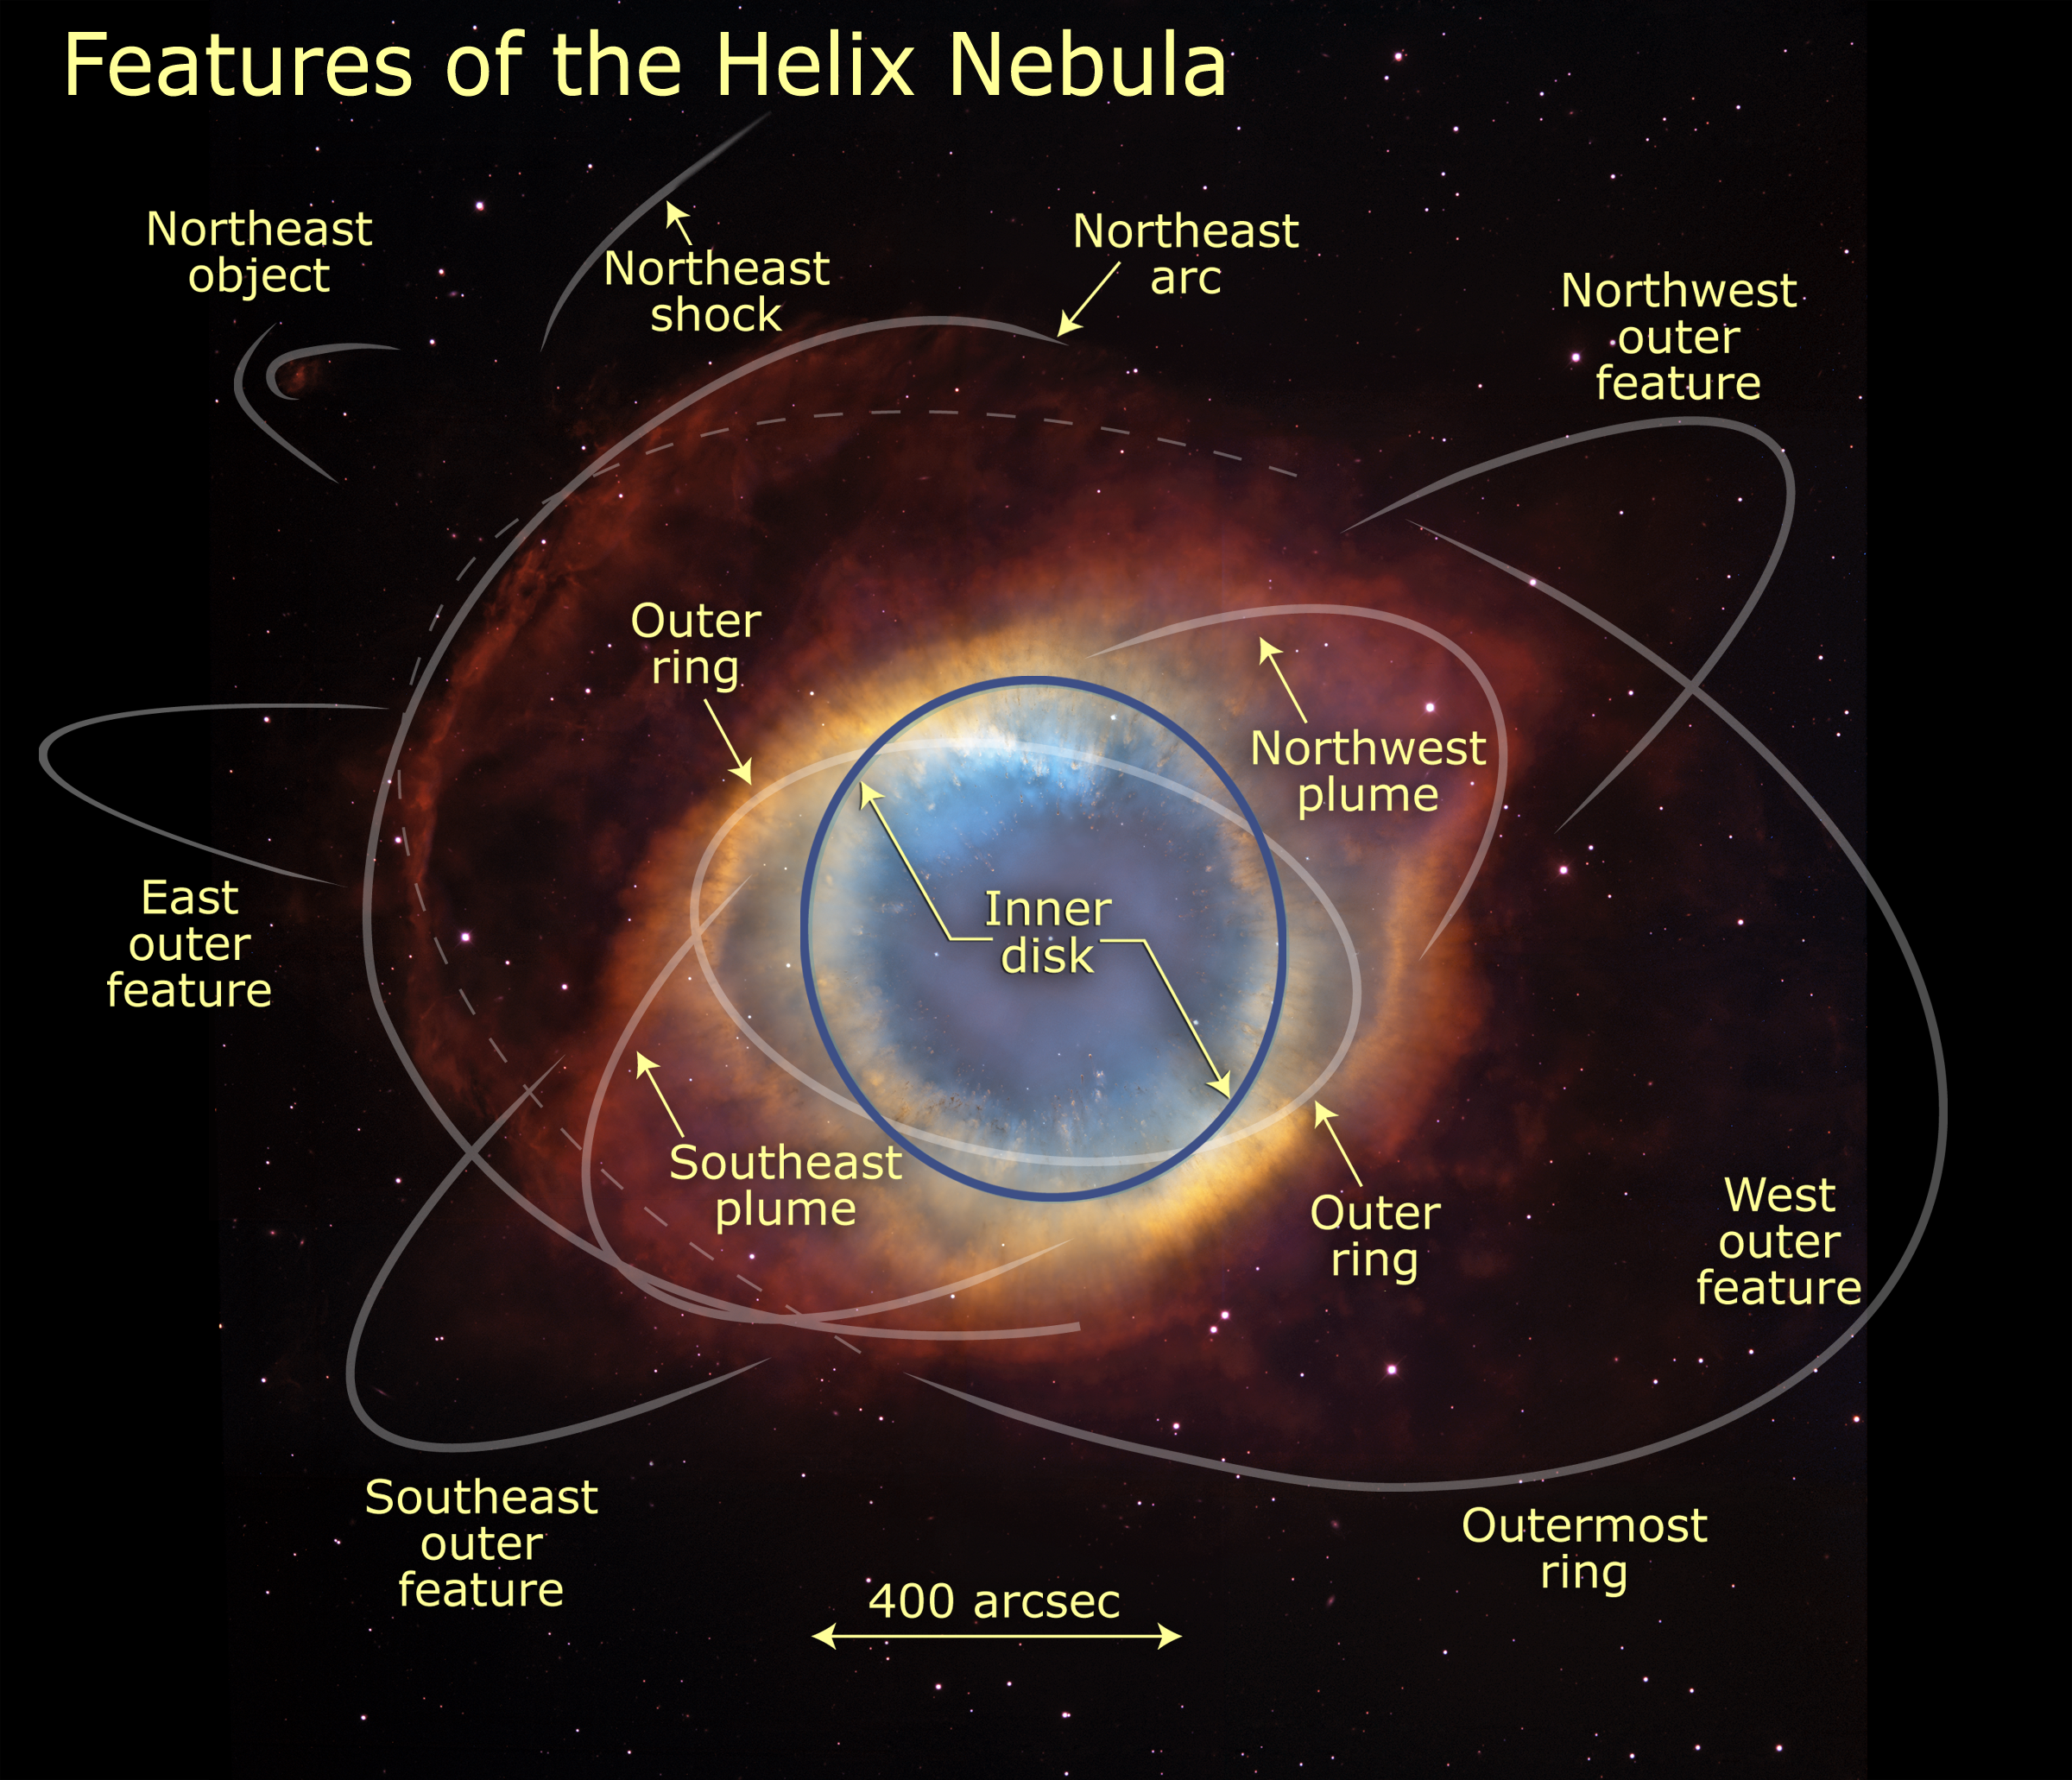

Helix Nebula with annotated features

Looks can be deceiving, especially when it comes to celestial objects like galaxies and nebulas. These objects are so far away that astronomers cannot see their three-dimensional structure. The Helix Nebula, for example, resembles a doughnut in colorful images.

Credit: NASA, ESA, C.R. O'Dell (Vanderbilt University), and M. Meixner, P. McCullough, and G. Bacon ( Space Telescope Science Institute)